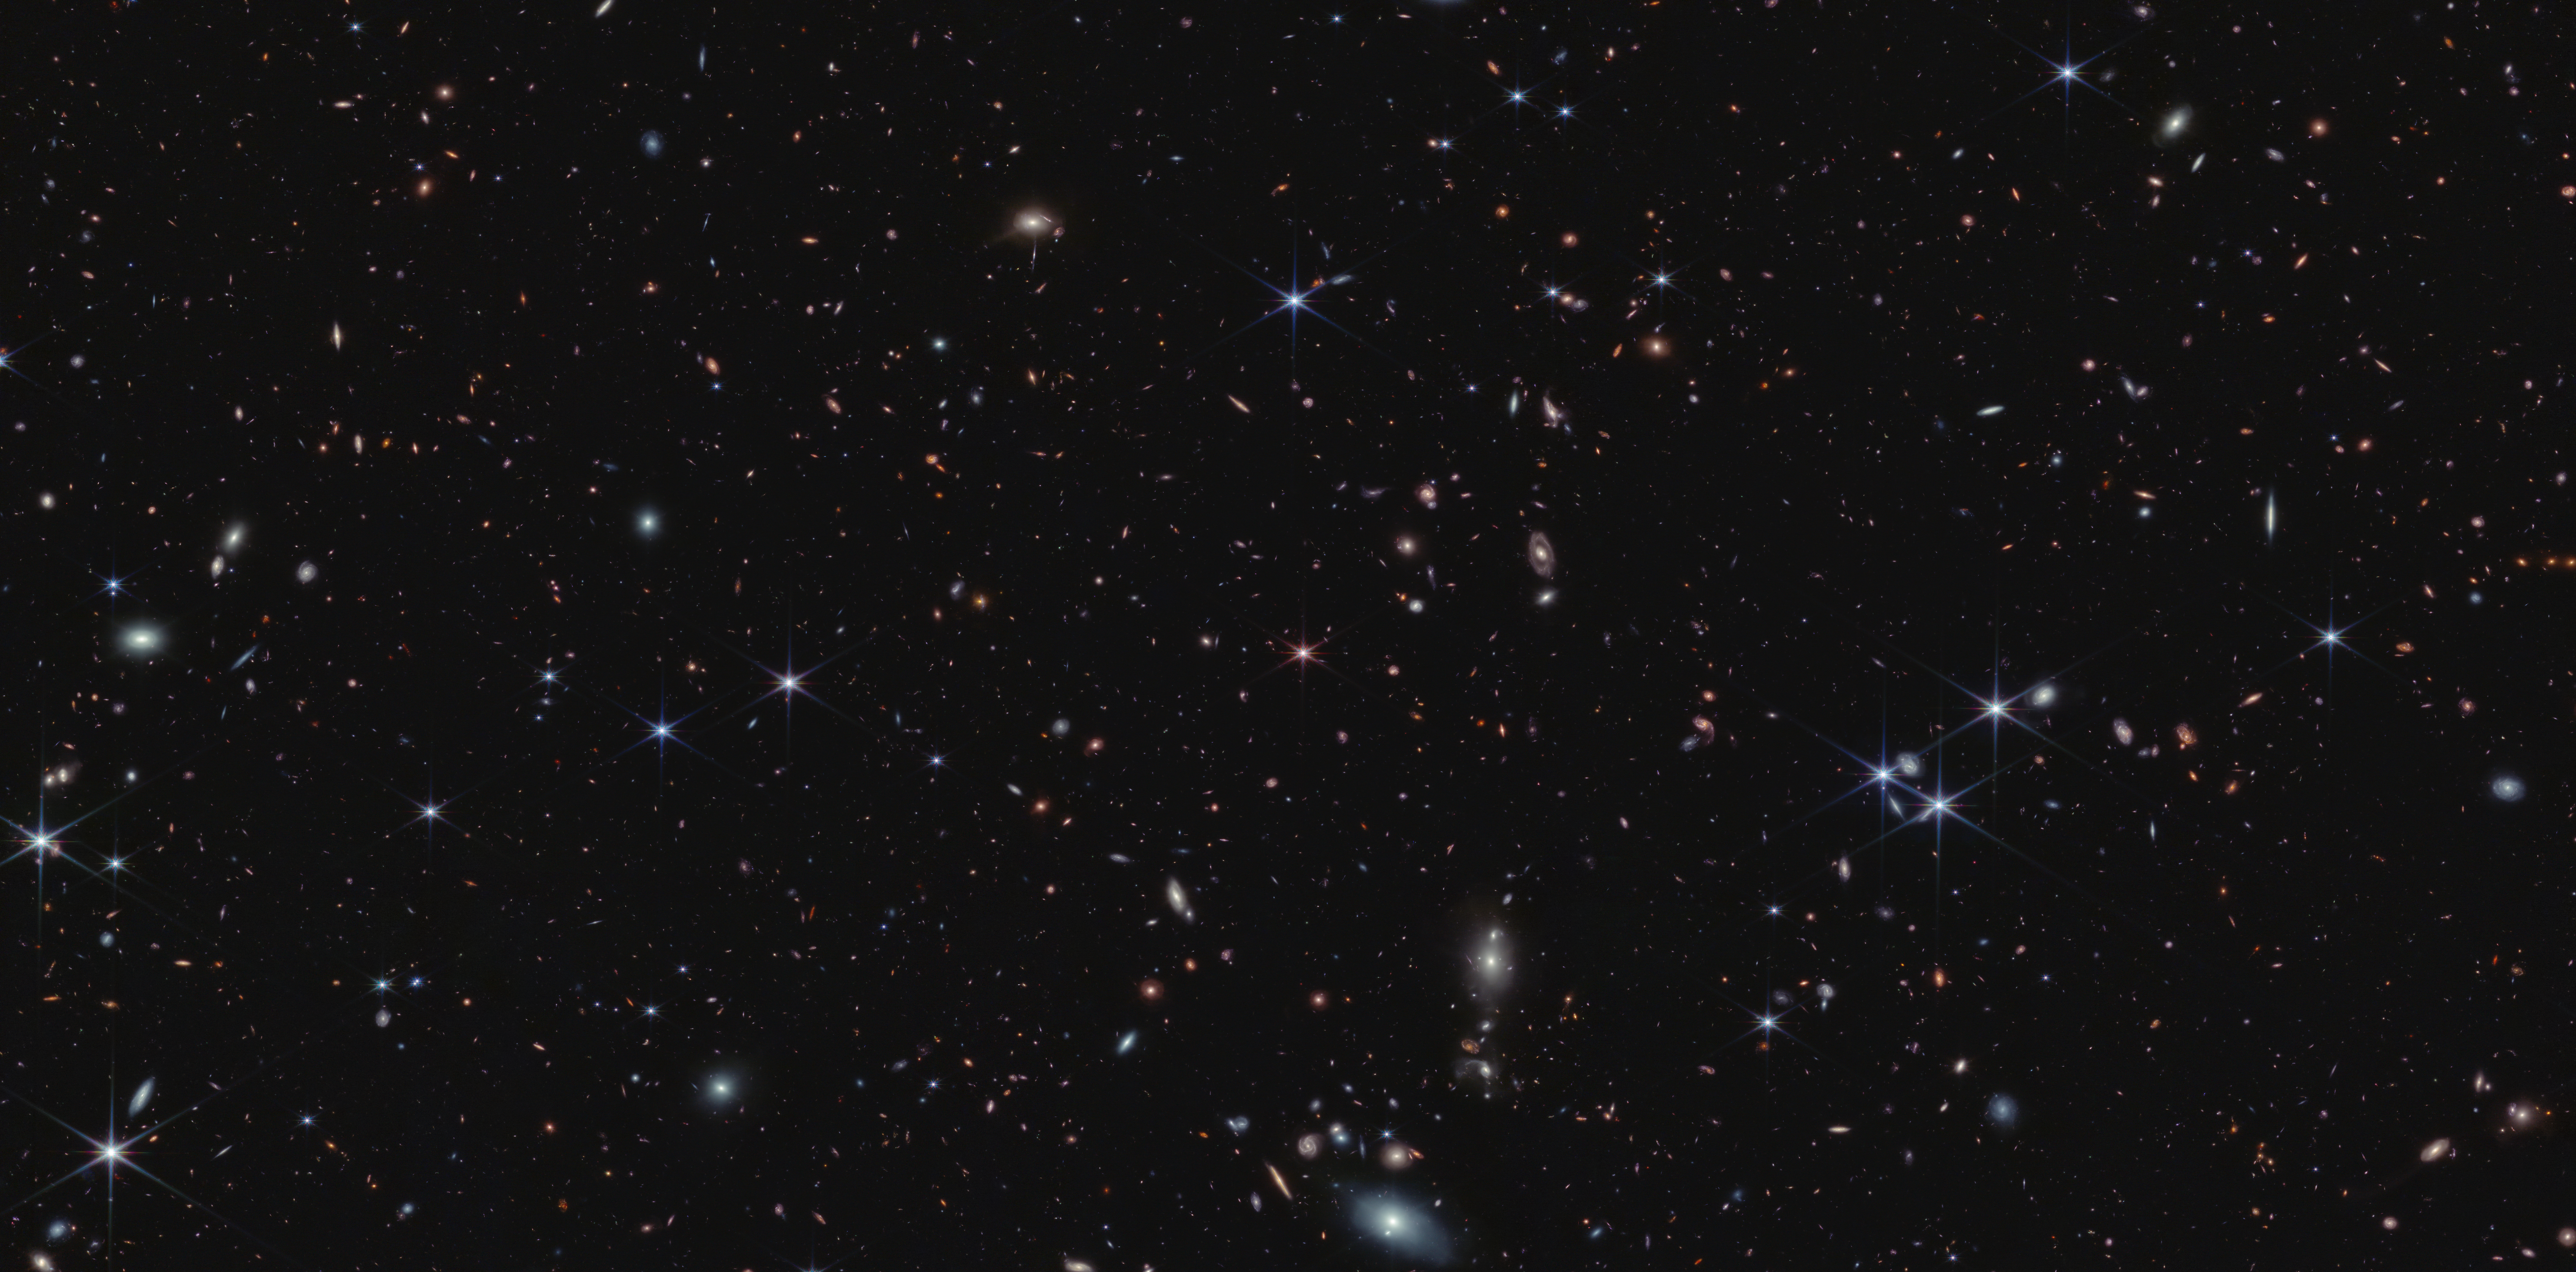

Quasar J0100+2802 (NIRCam Image)

There are more than 20,000 galaxies in this field. This NASA/ESA/CSA James Webb Space Telescope view is found between the Pisces and Andromeda constellations.

Researchers using Webb anchored their observations on quasar J0100+2802, an active supermassive black hole that acts like a beacon. It is at the centre of the image above, and appears tiny and pink with six prominent diffraction spikes.

The quasar is so luminous that it acts like a flashlight, illuminating the gas between it and the telescope. The team analyzed 117 galaxies that all existed approximately 900 million years after the big bang – focusing on 59 that lie in front of the quasar. The researchers could study not only the galaxies themselves, but also the illuminated gas surrounding them.

These galaxies existed just before the end of the Era of Reionisation, when the Universe contained a patchwork of gas – some opaque and some transparent (or ionised).

Researchers have long sought evidence to explain what happened during this period, when the Universe experienced dramatic changes. After the big bang, gas in the Universe was incredibly hot and dense. Over hundreds of millions of years, the gas cooled. Then, the Universe hit “repeat.” The gas again became hot and ionised – and transparent.

The team’s results more concretely define the conditions at this specific “stop” in the Universe’s history. Webb shows that these transparent regions exist around galaxies. They are much like hot air balloons, with galaxies the size of peas clearing that space.

Webb showed that galaxies have fully ionised the gas within a 2 million light-year radius. That’s approximately the same distance as the space between our Milky Way galaxy and our nearest neighbour, Andromeda. Over the next hundred million years, the bubbles went on to grow larger and larger, eventually merging and causing the entire Universe to become transparent.

These results were announced by members of the Emission-line galaxies and Intergalactic Gas in the Epoch of Reionisation (EIGER) team. The team will eventually have images and data from six fields, each centred on a quasar, but Webb’s first image from NIRCam (Near-Infrared Camera) and data known as spectra are so detailed that they could easily make definitive conclusions without waiting for additional observations.

Credit: NASA, ESA, CSA, S. Lilly (ETH Zurich), D. Kashino (Nagoya University), J. Matthee (ETH Zurich), C. Eilers (MIT), R. Simcoe (MIT), R. Bordoloi (MIT), R. Mackenzie (ETH Zurich), A. Pagan (STScI)